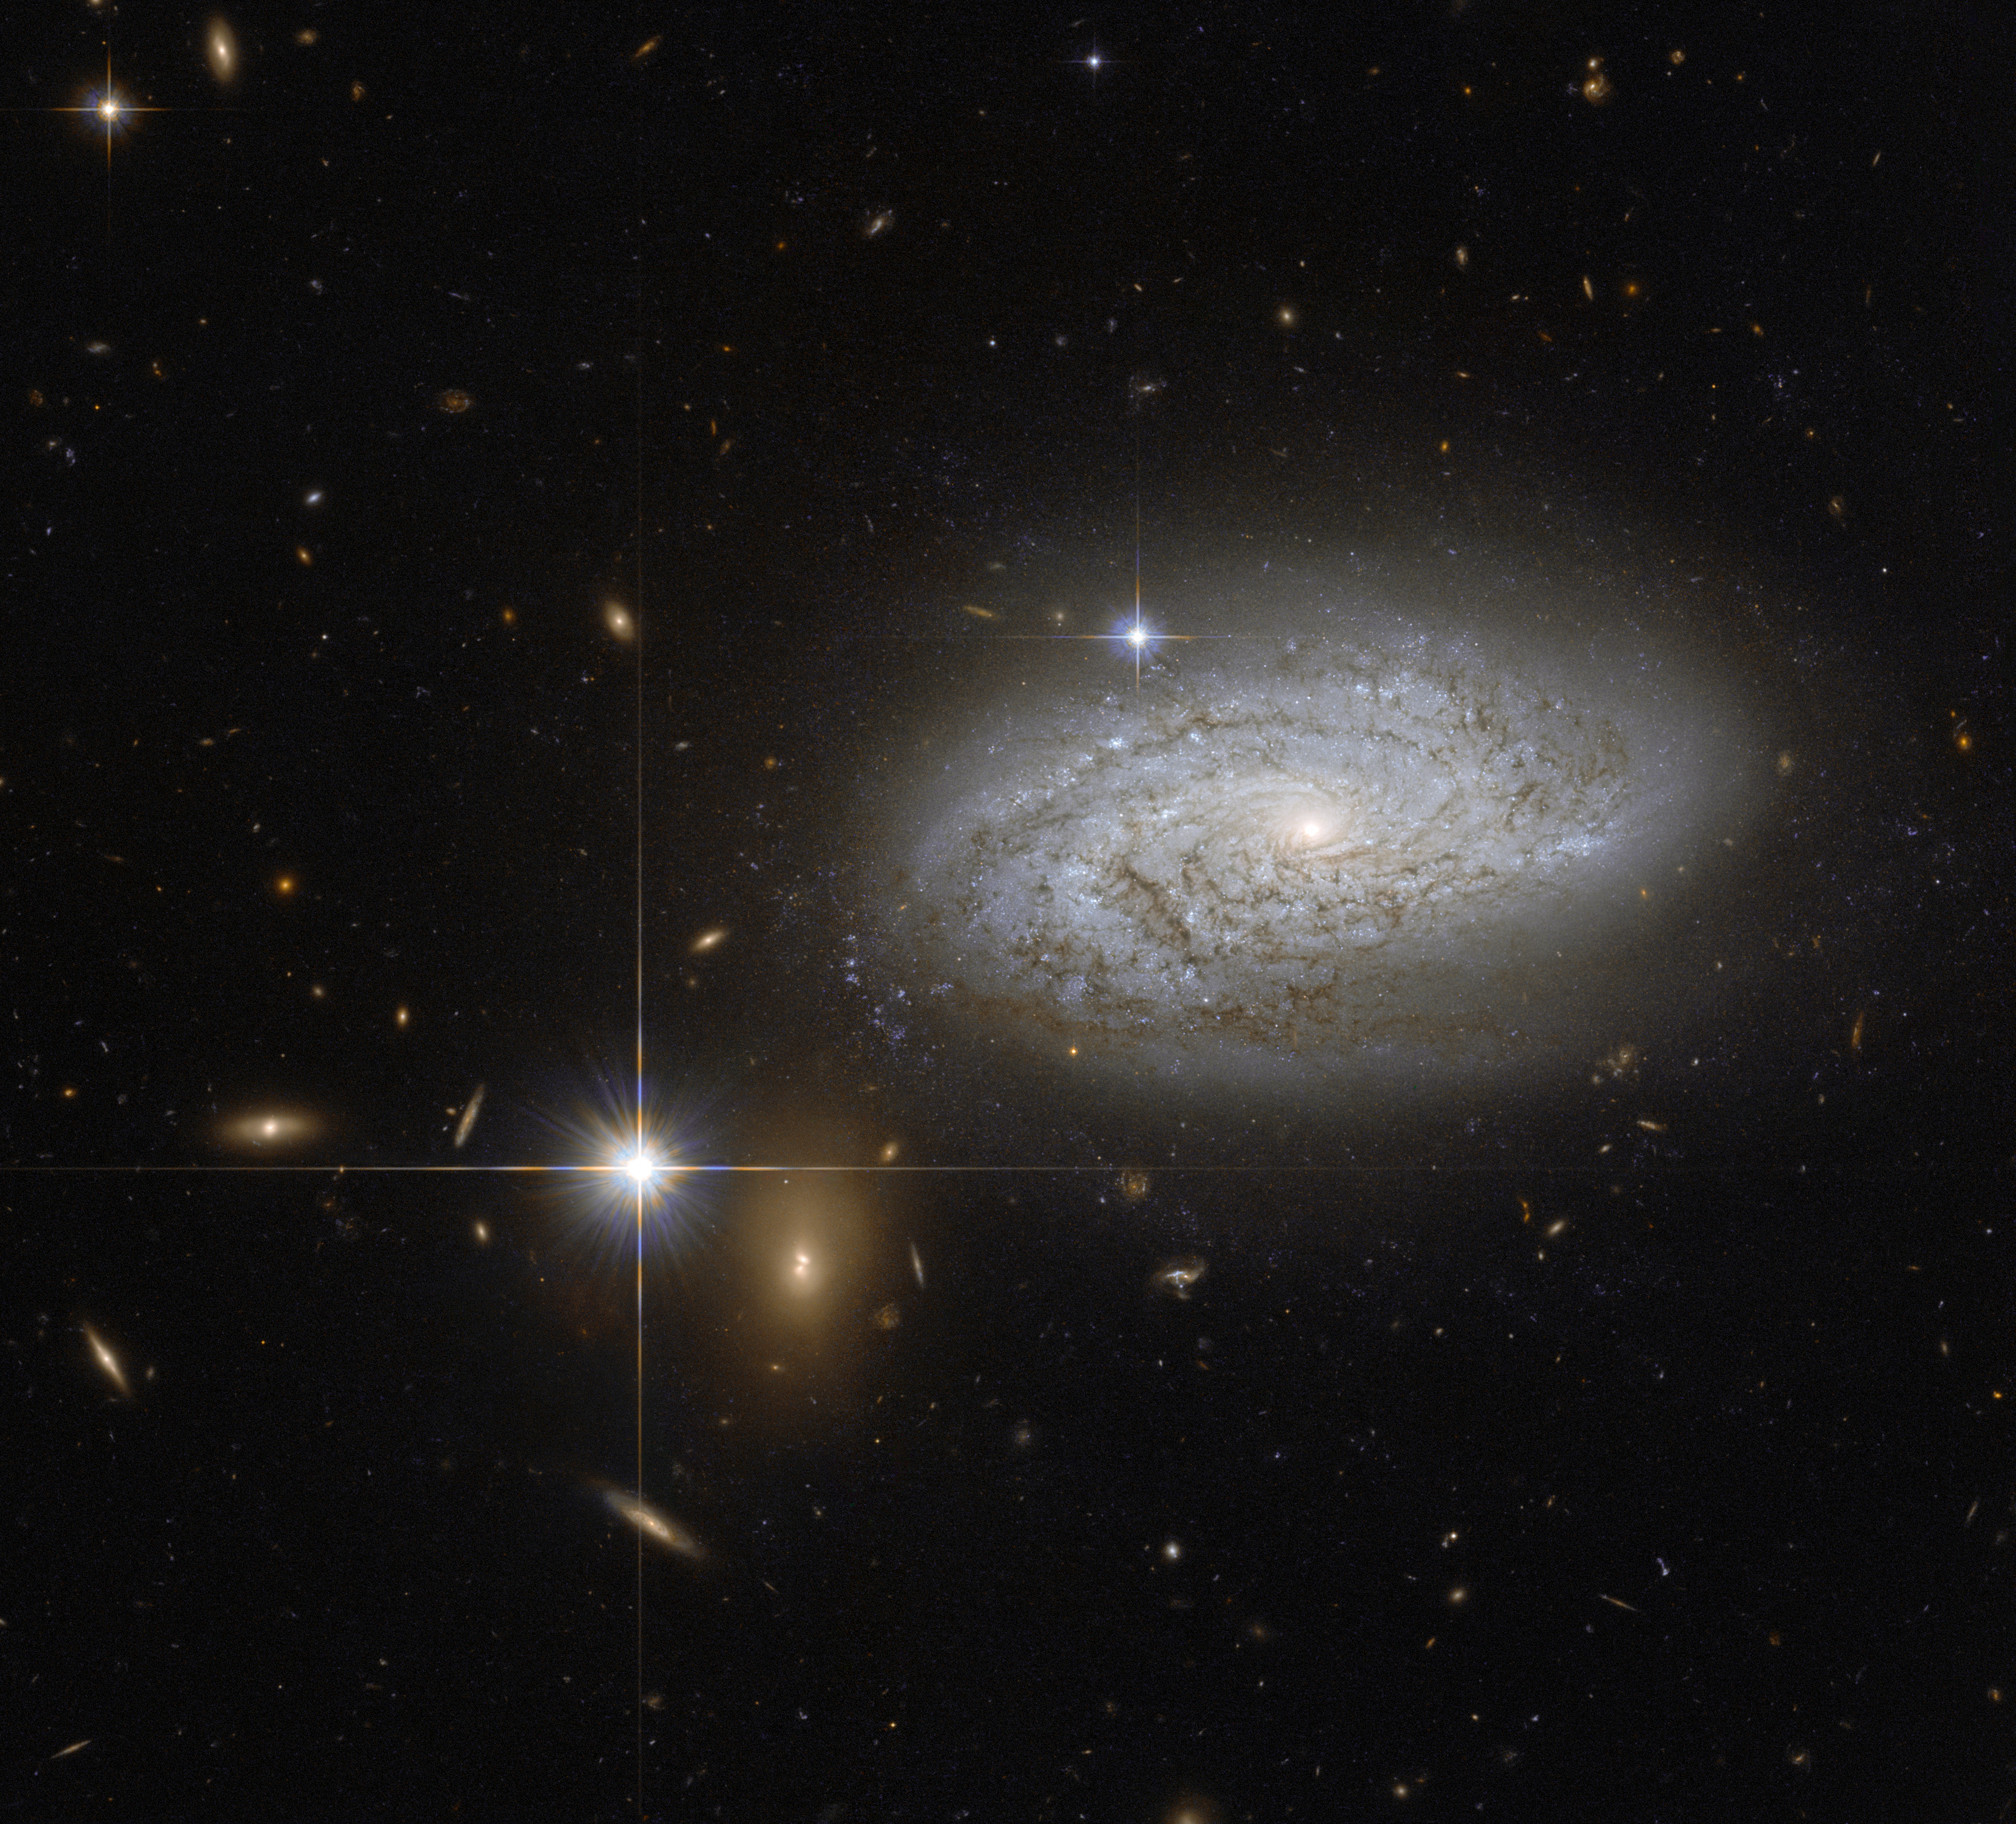

A cosmological measuring tape

This NASA/ESA Hubble Space Telescope image shows the spiral galaxy NGC 3021 which lies about 100 million light-years away in the constellation of Leo Minor (The Little Lion).

Among many other types of stars, this galaxy contains Cepheid variable stars, which can be used work out the distance to the galaxy. These stars pulsate at a rate that is closely related to their intrinsic brightness, so measurements of their rate of pulsation and their observed brightness give astronomers enough information to calculate the distance to the galaxy itself.

Cepheids are also used to calibrate an even brighter distance marker, that can be used over greater distances: Type Ia supernovae. One of these bright exploding stars was observed in NGC 3021, back in 1995.

In addition, the supernova in NGC 3021 was also used to refine the measurement of what is known as the Hubble constant. The value of this constant defines how fast the Universe is expanding and the more accurately we know it the more we can understand about the evolution of the Universe in the past as well as in the future. So, there is much more to this galaxy than just a pretty spiral.

Credit: NASA & ESA
Acknowledgement: A. Riess (STScI)